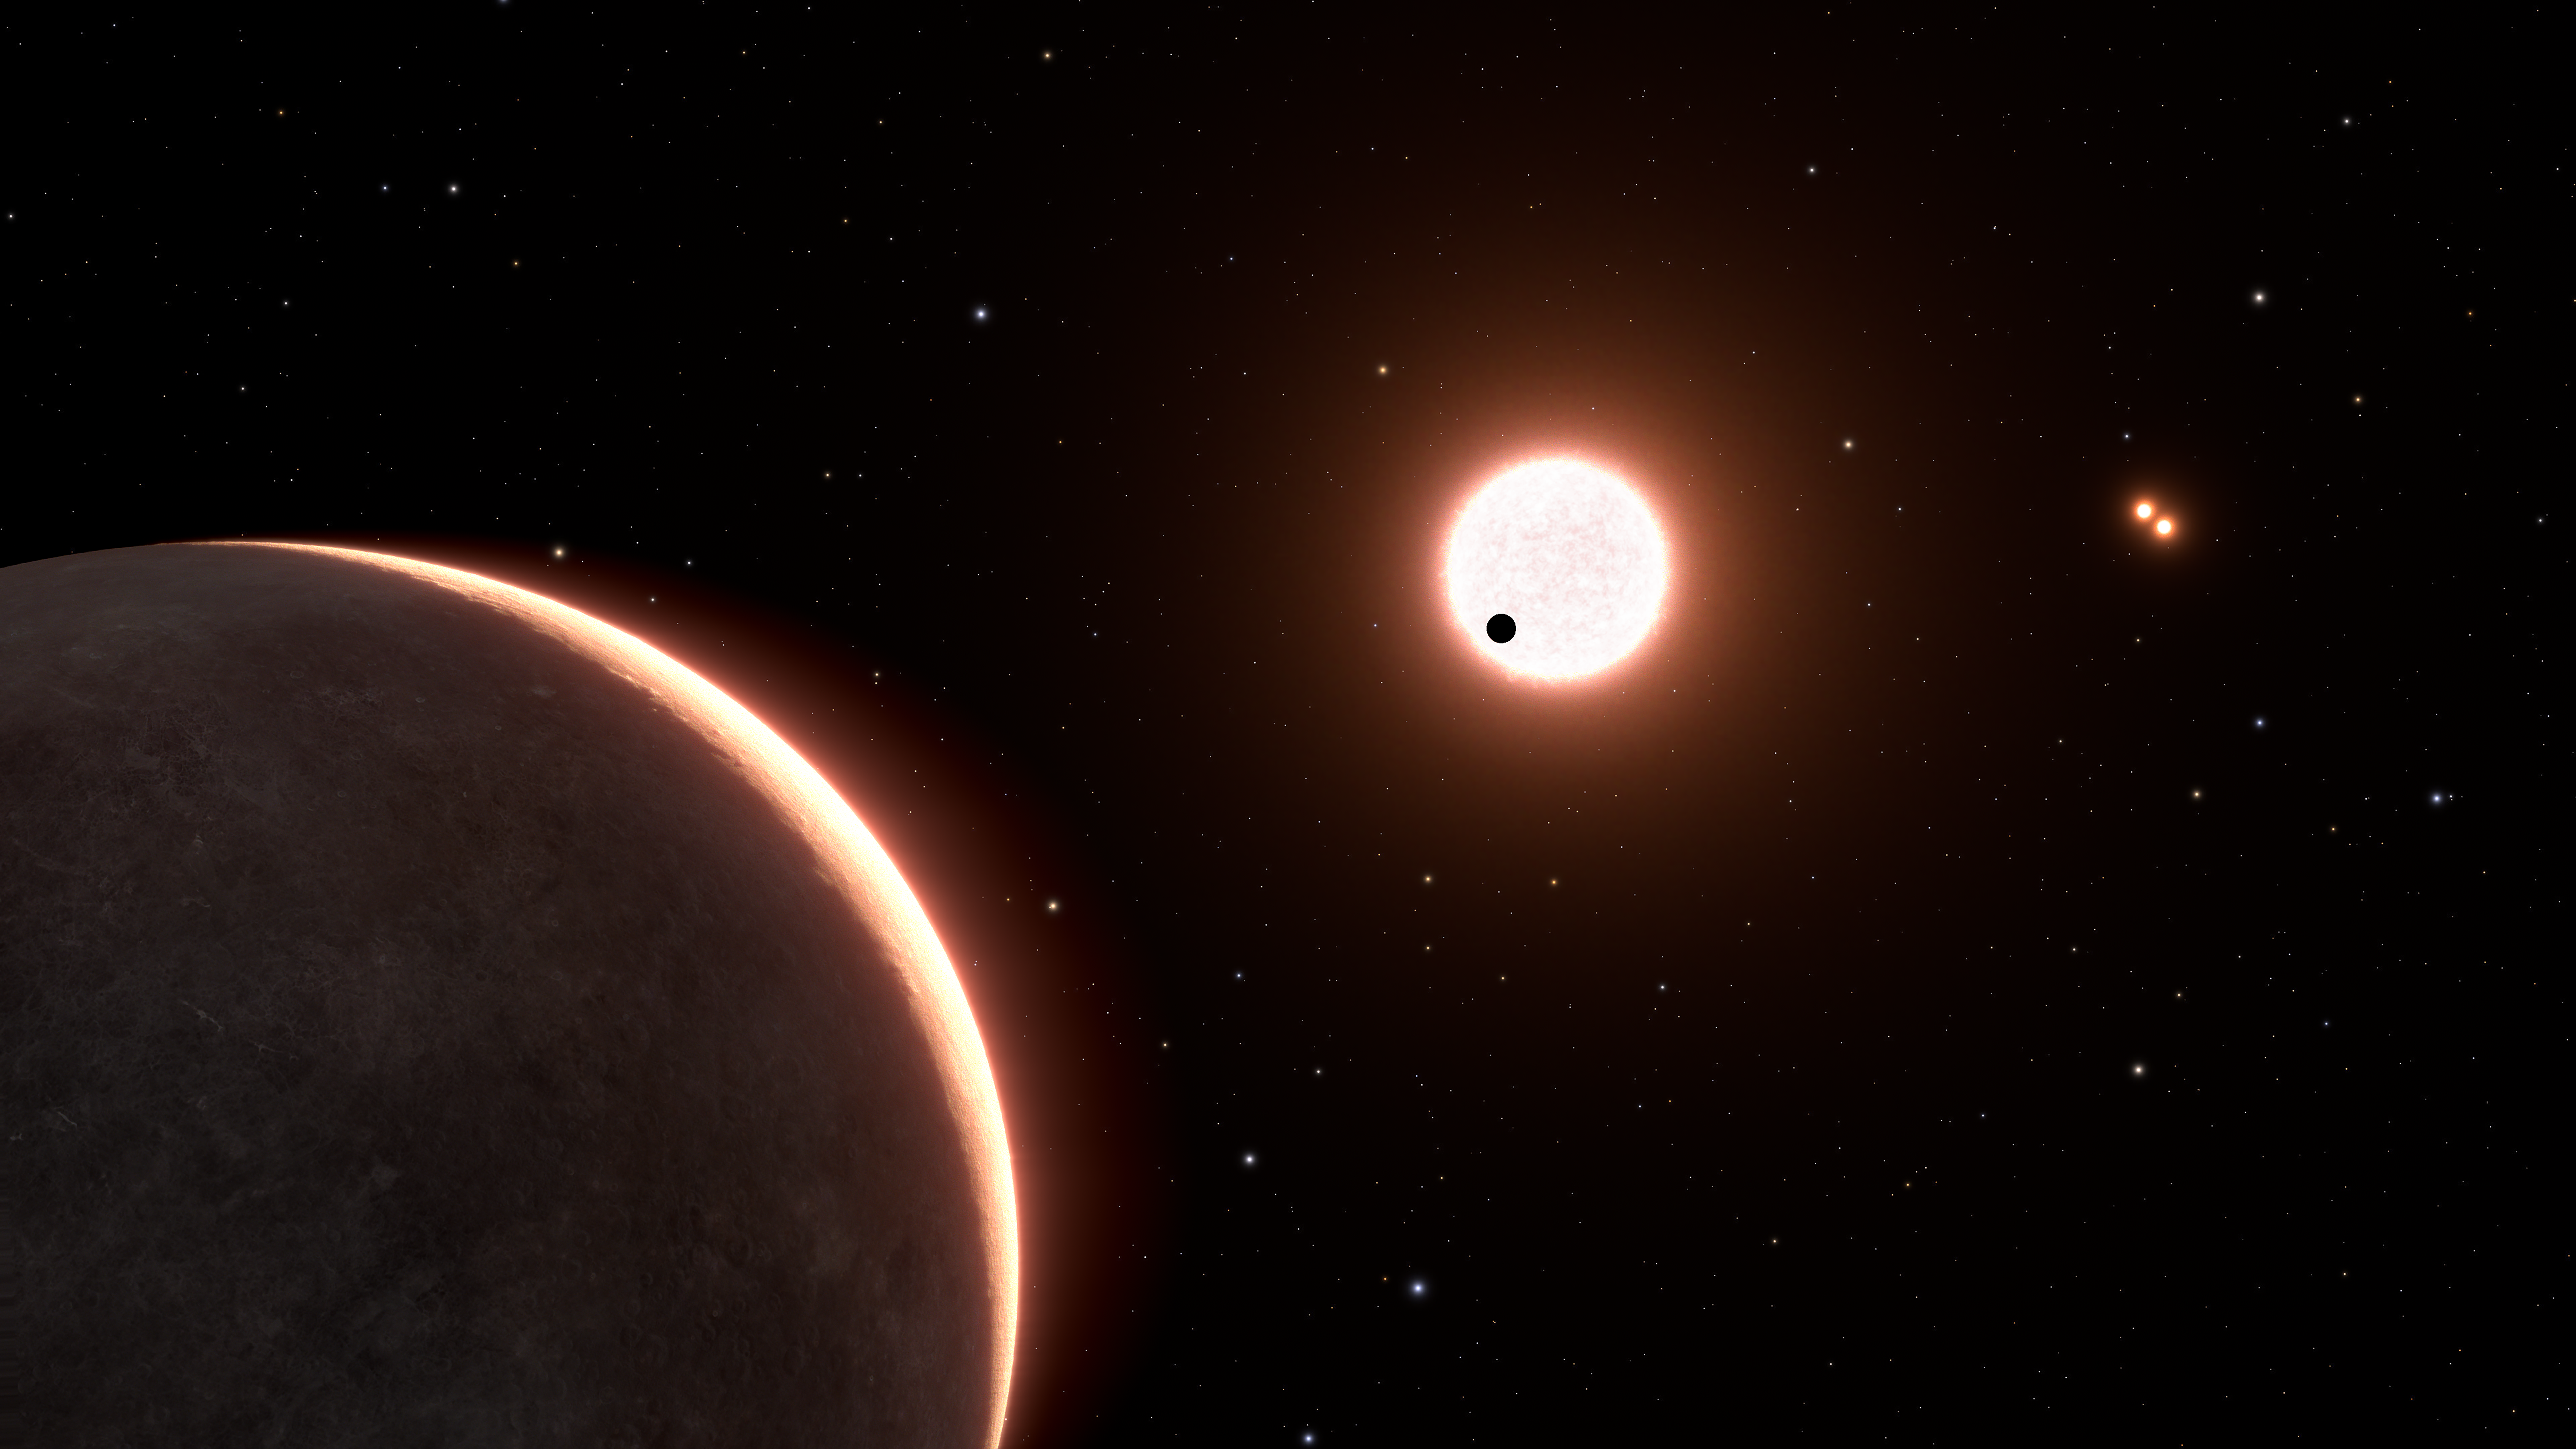

Artist’s concept of exoplanet LTT 1445ac

This is an artist’s concept of the nearby exoplanet, LTT 1445Ac, which is the size of Earth. The planet orbits a red dwarf star. The star is in a triple system, with two closely orbiting red dwarfs seen at upper right. The black dot in front of the foreground star is planet LTT 1445Ab, transiting the face of the star. Exoplanet LTT 1445Ac has a surface temperature of roughly 500 degrees Fahrenheit. The view is from 22 light-years away, looking back toward our Sun, which is the bright dot at lower right. Some of the background stars are part of the constellation Boötes.

Credit: NASA, ESA, L. Hustak (STScI)